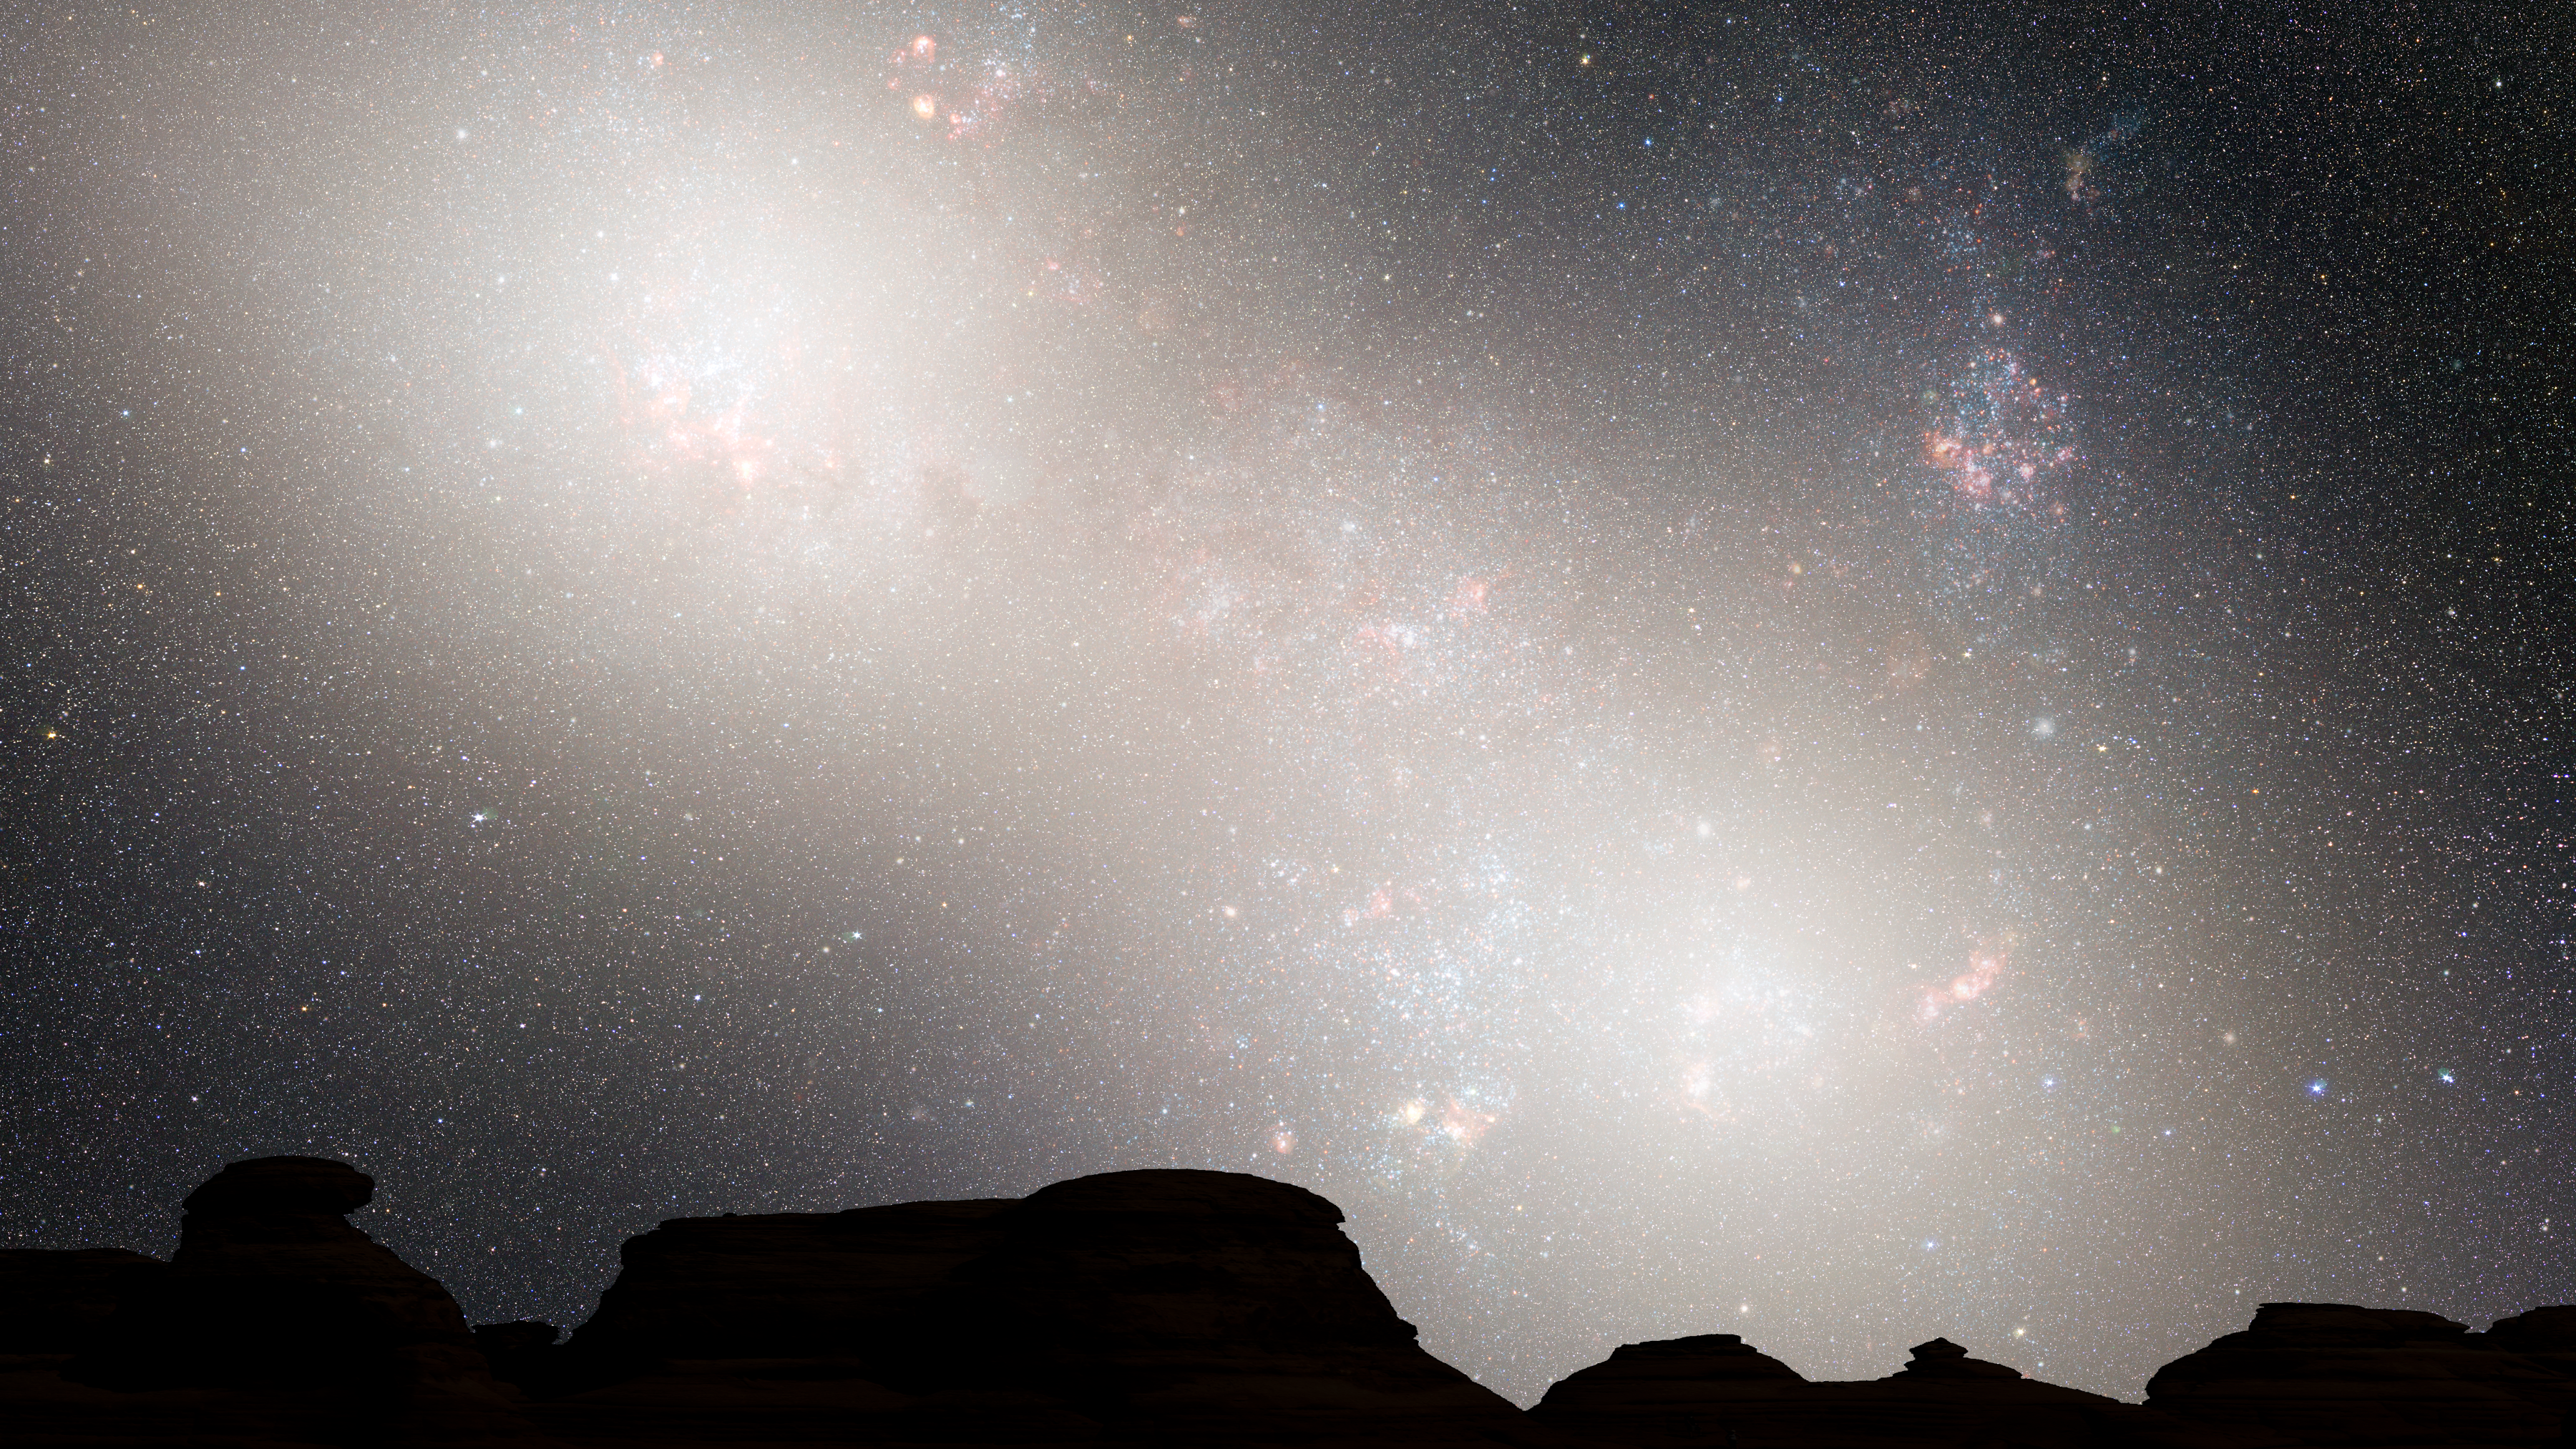

Nighttime Sky View of Future Galaxy Merger: 5.1 Billion Years

During the second close passage, the cores of the Milky Way and Andromeda appear as a pair of bright lobes. Star-forming nebulae are much less prominent because the interstellar gas and dust has been significantly decreased by previous bursts of star formation.

Credit: NASA, ESA, Z. Levay and R. van der Marel (STScI), T. Hallas, and A. Mellinger